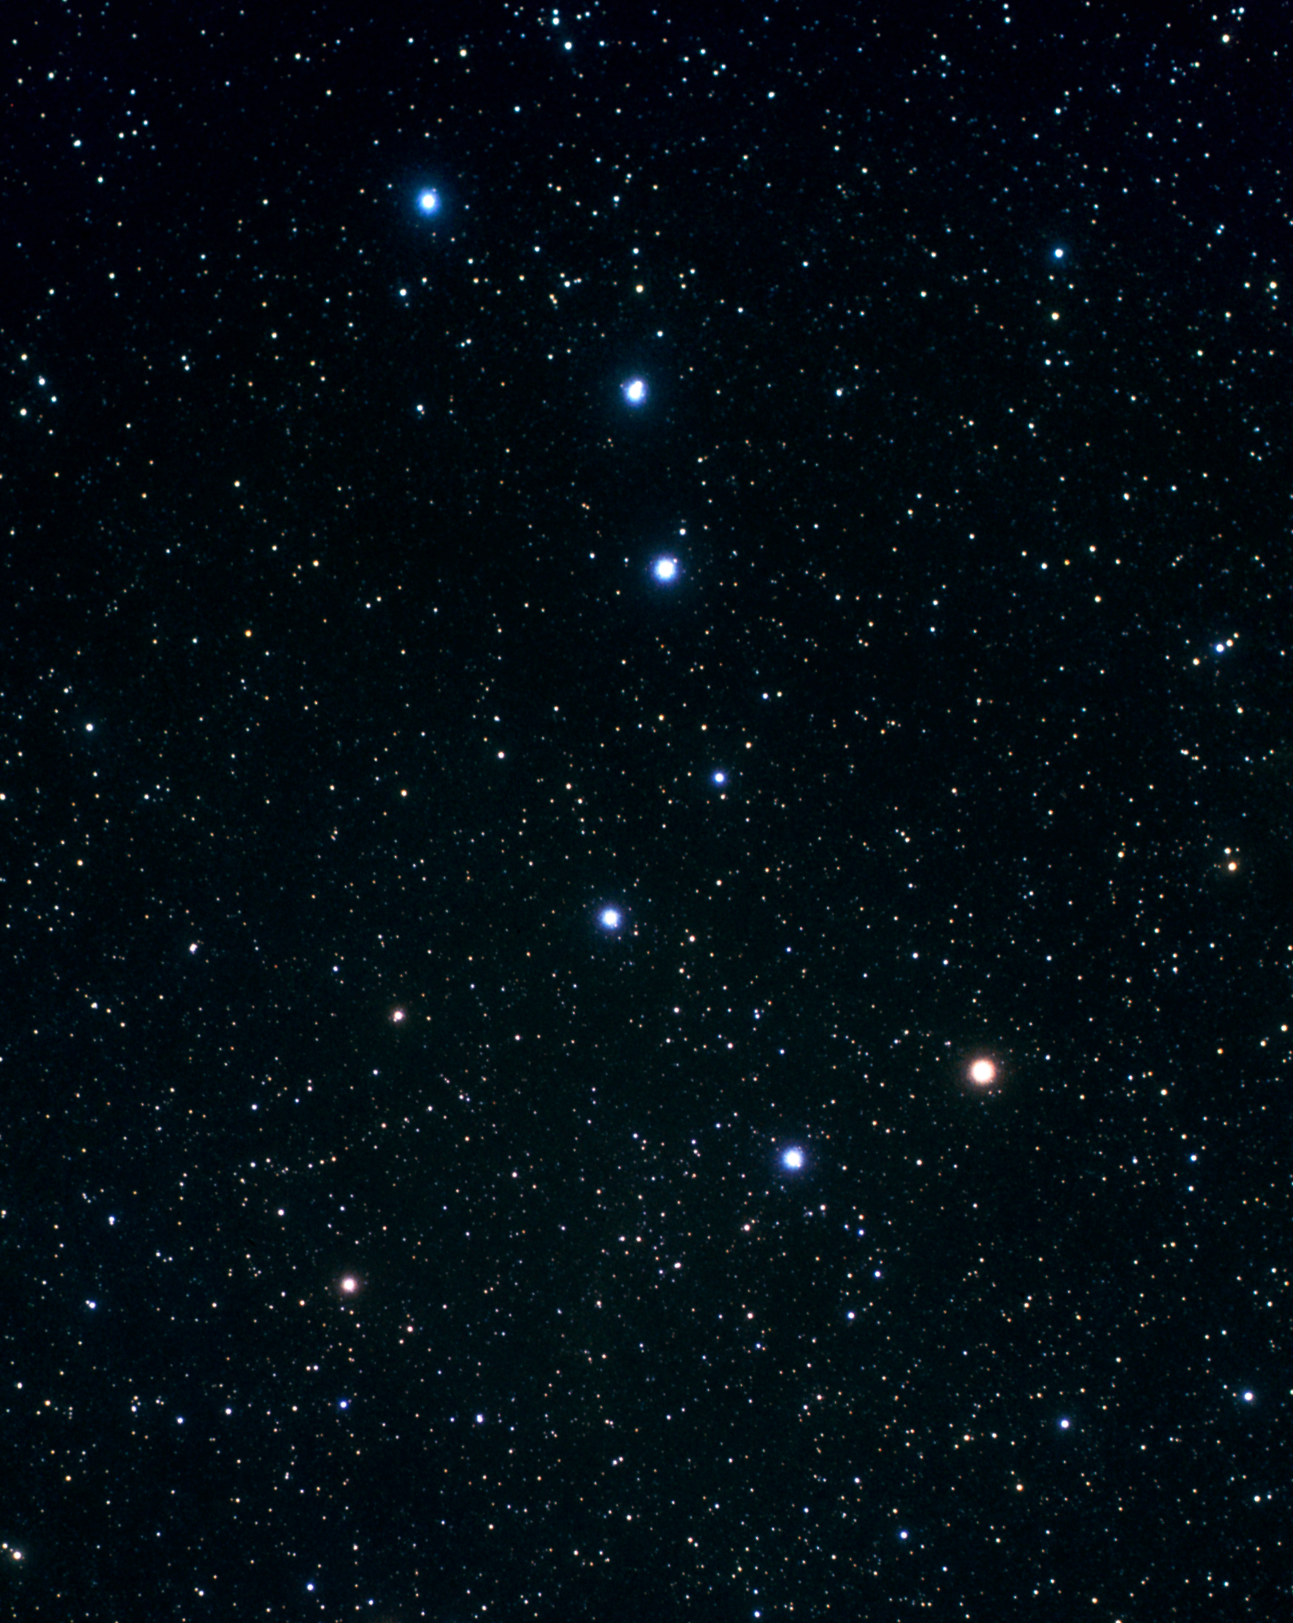

Constellation Ursa Major (ground-based image)

This image at left, taken by Akira Fujii with a backyard telescope, shows the location of the Hubble observations near the Big Dipper.

Credit: A. Fujii